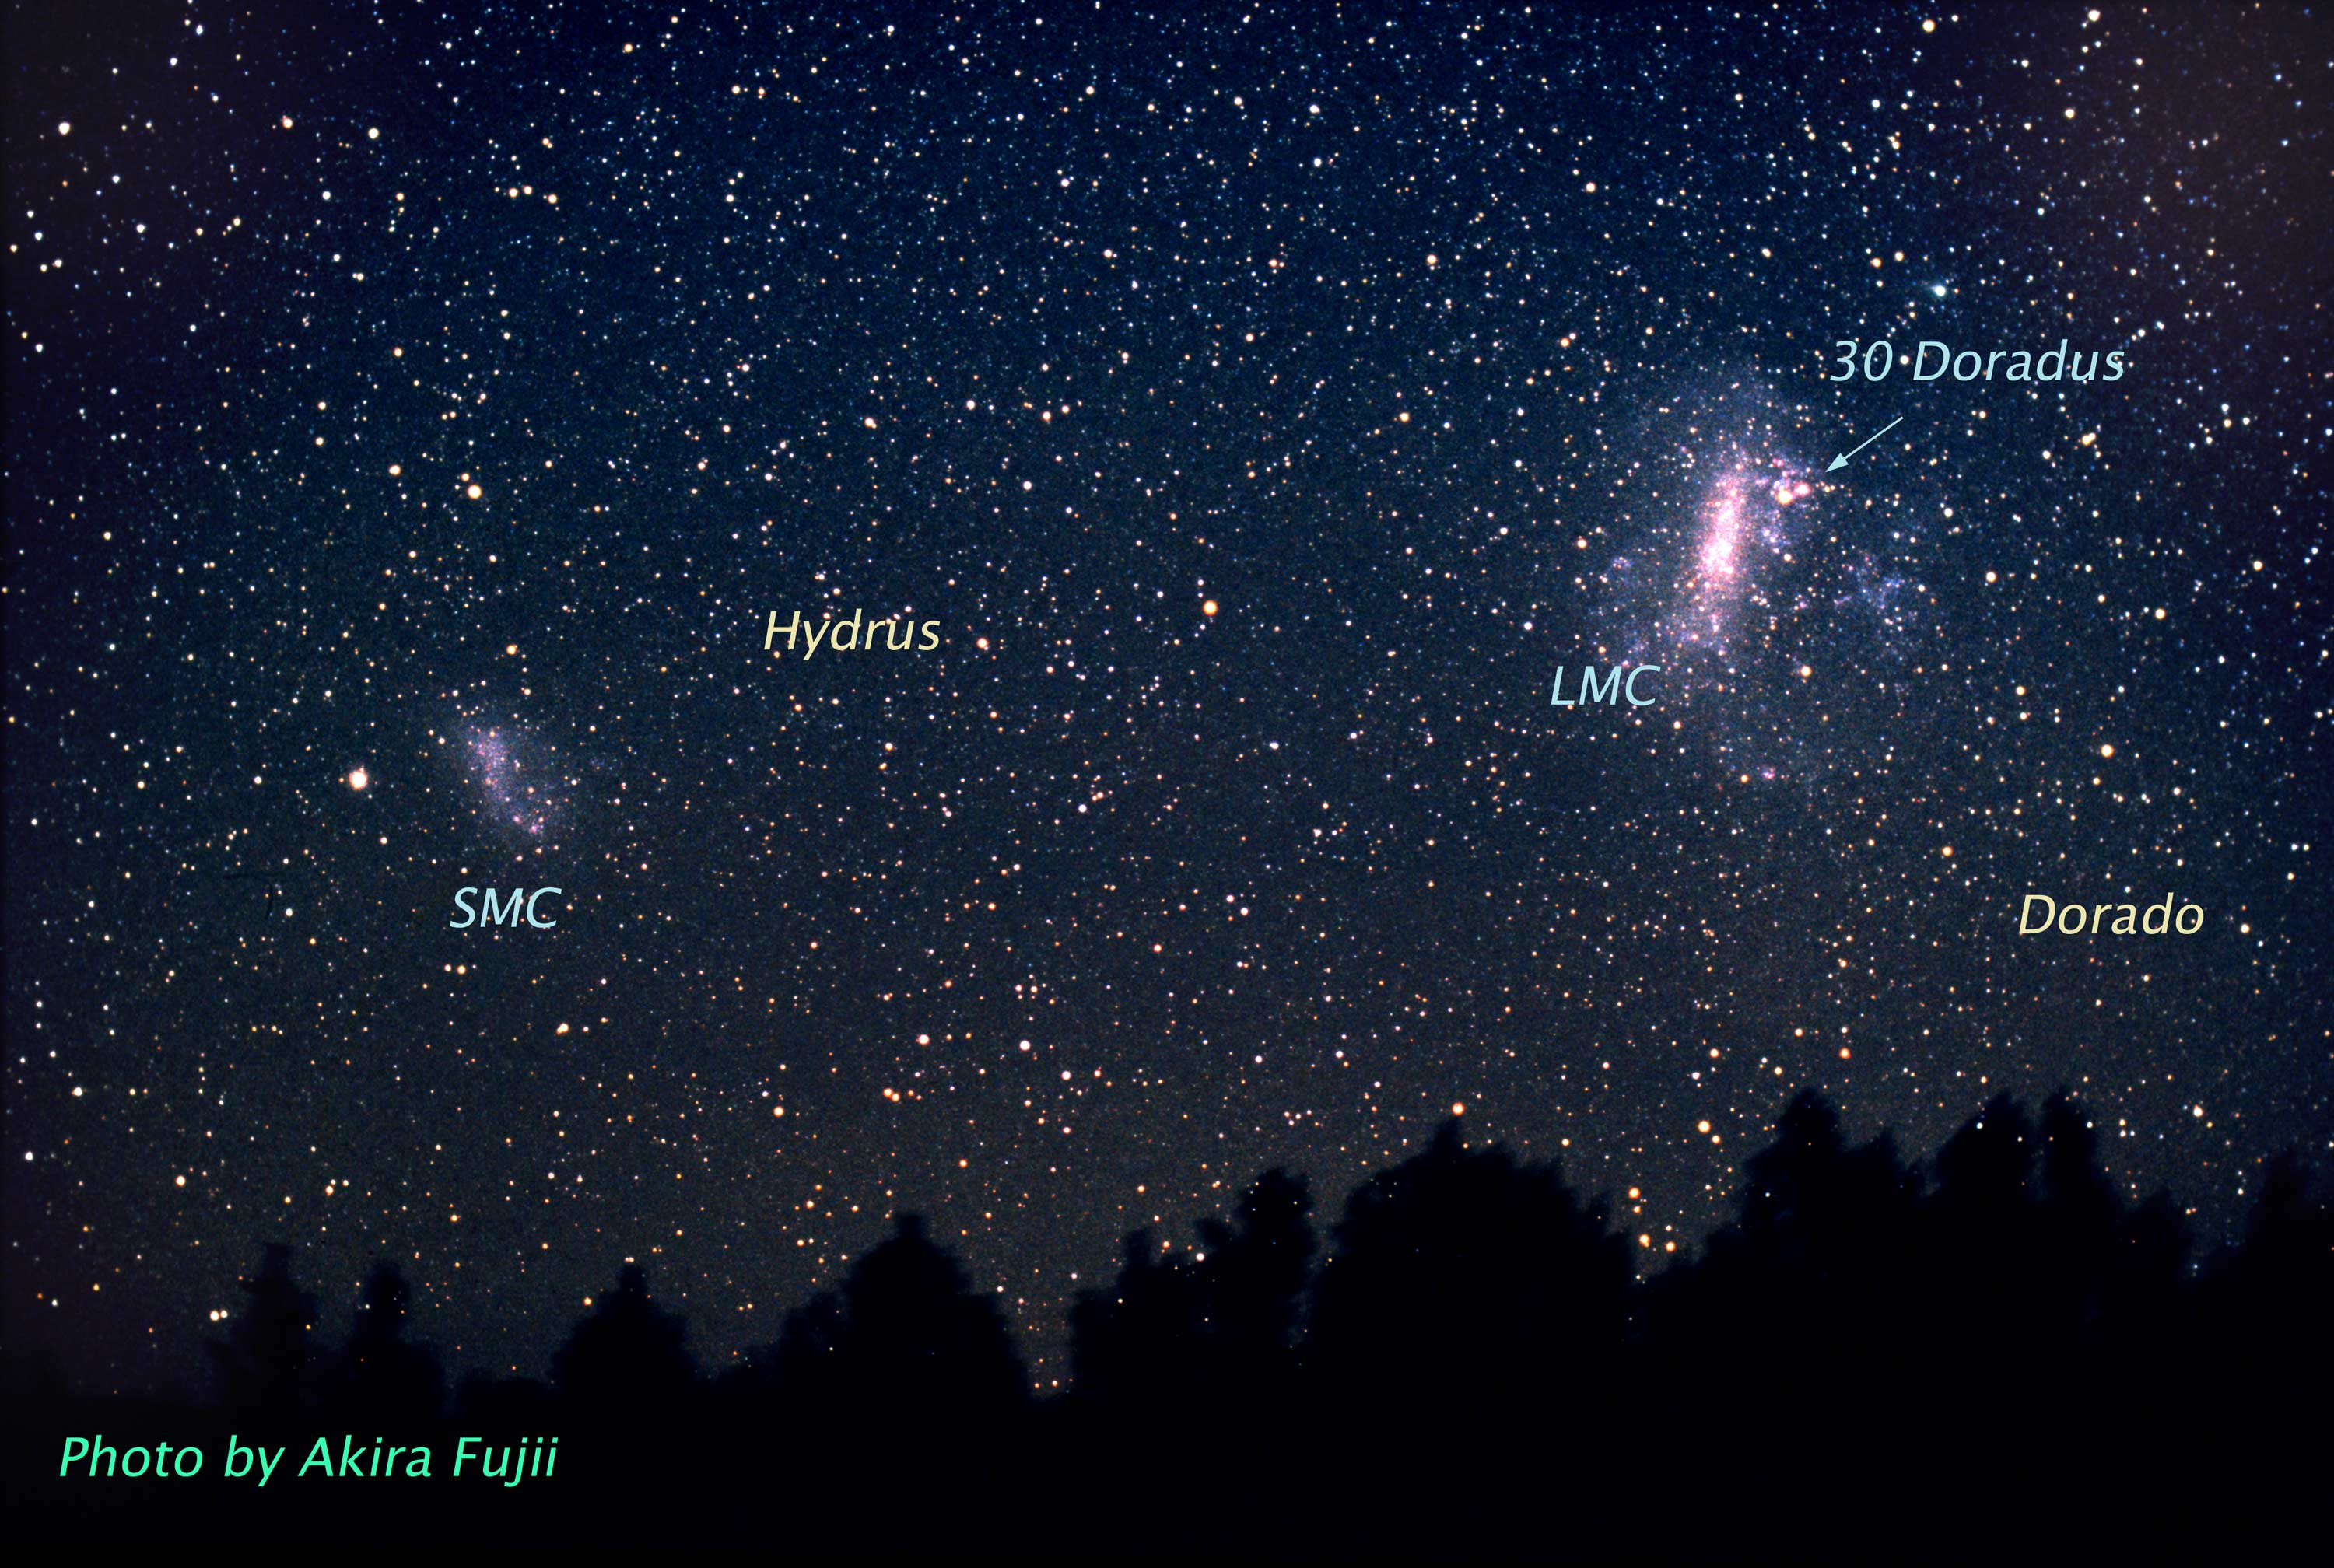

Doradus Constellation (ground-based image)

This is a ground-based image of the Doradus Constellation. The 30 Doradus is a region of the Large Magellanic Cloud (LMC). The LMC is a satellite galaxy of our Milky Way and this particular region is the largest and most prolific star forming region in our galaxy. Many of the stars are among the most massive known. Several of them are over 100 times more massive than our Sun.

Credit: A. Fujii